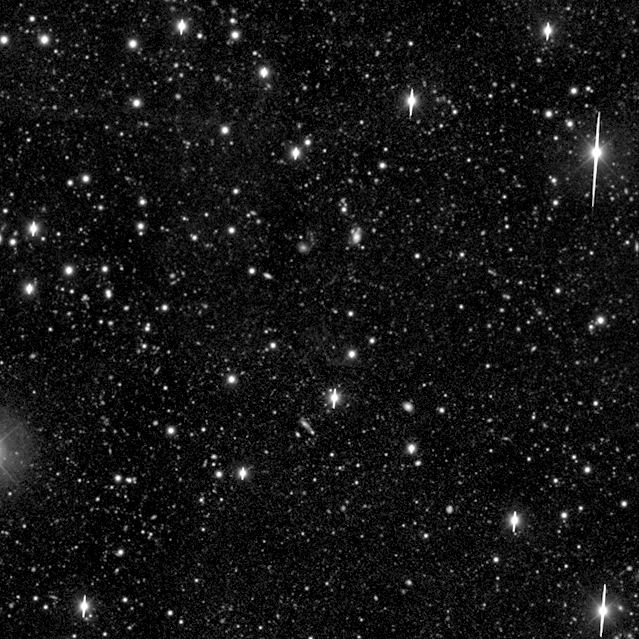

Hubble Deep Field South--Multiple Windows on the Universe

Hubble's Near Infrared and Multi-Object Spectrometer (NICMOS) captures the 'invisible light' coming from stars hidden in dusty galaxies, and galaxies that are so far away their light has been stretched beyond the red end of the visible spectrum.

Credit: R. Williams (STScI), the HDF-S Team, and NASA/ESA